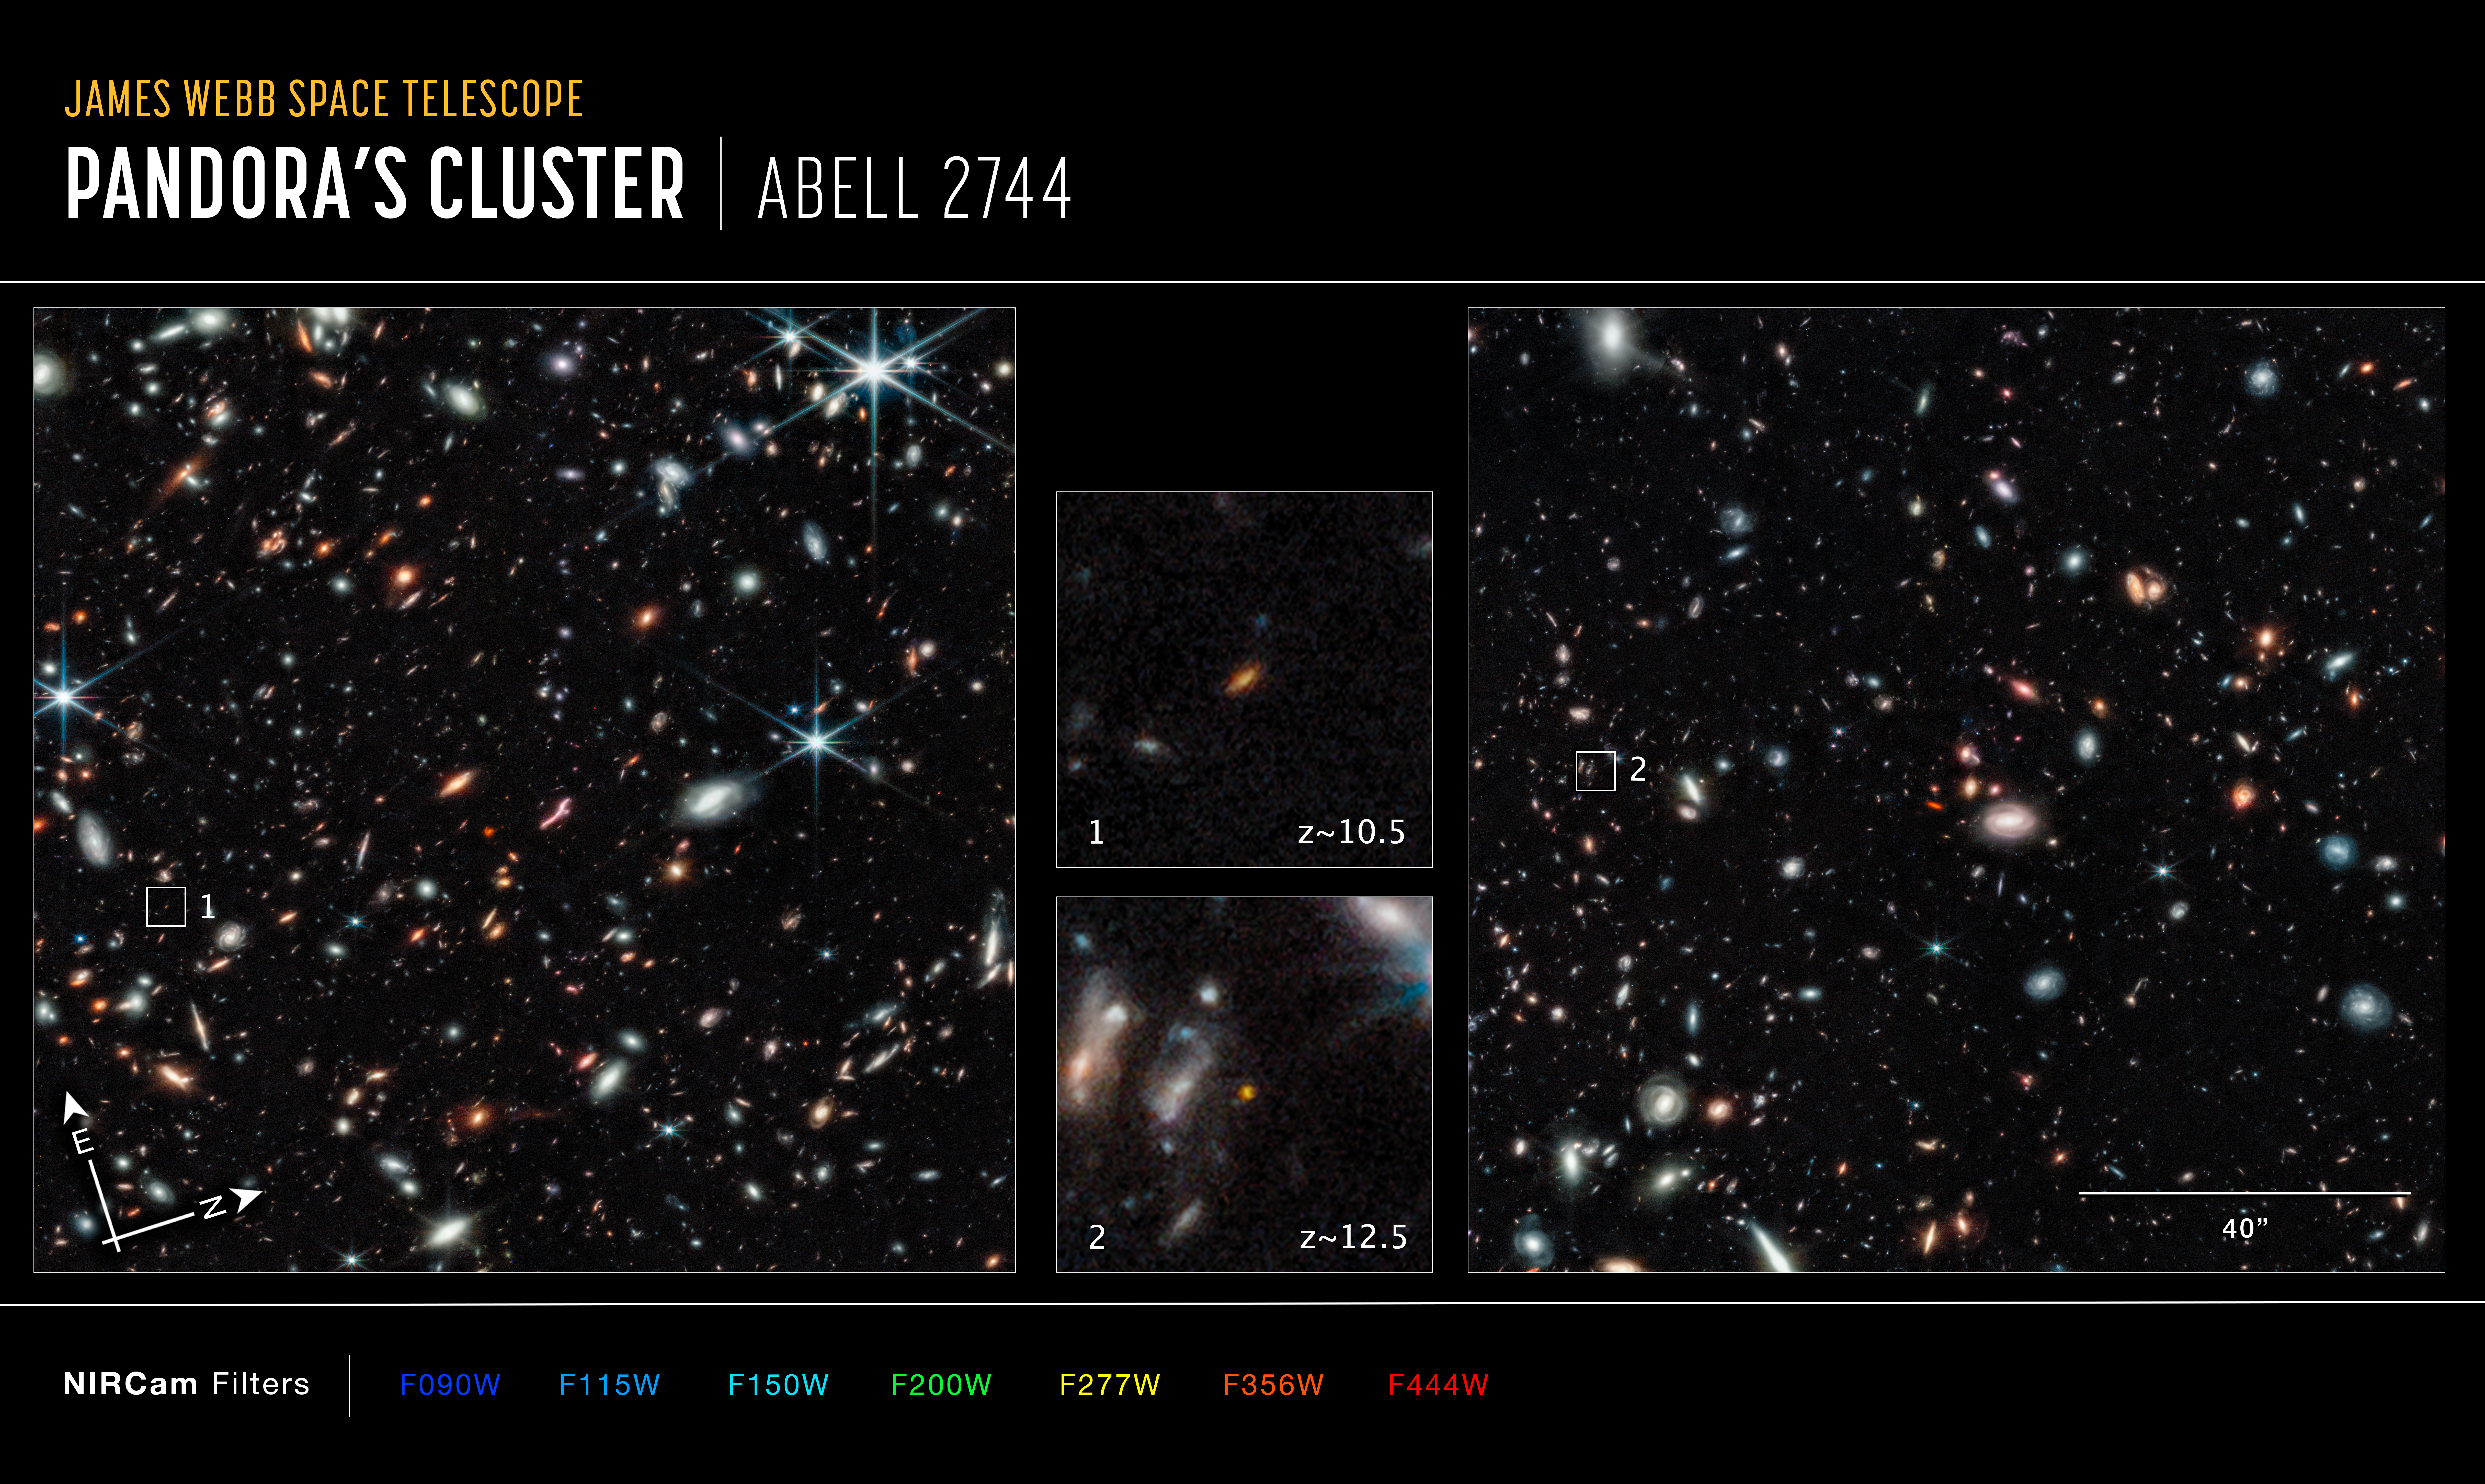

Pandora’s Cluster, Abell 2744 - NIRCam (Annotated)

Images of Pandora’s Cluster, Abell 2744, captured by Webb’s Near-Infrared Camera (NIRCam).

The north and east compass arrows show the orientation of the image on the sky. Note that the relationship between north and east on the sky (as seen from below) is flipped relative to direction arrows on a map of the ground (as seen from above).

The scale bar is labelled in arcseconds, which is a measure of angular distance on the sky. One arc second is equal to 1/3600 of one degree of arc. (The full Moon has an angular diameter of about 0.5 degrees.) The actual size of an object that covers one arc second on the sky depends on its distance from the telescope.

This image shows invisible near-infrared wavelengths of light that have been translated into visible-light colours. The colour key shows which NIRCam filters were used when collecting the light. The name of each filter is the visible light colour used to represent the infrared light that passes through that filter.

Credit: NASA, ESA, CSA, T. Treu (UCLA)